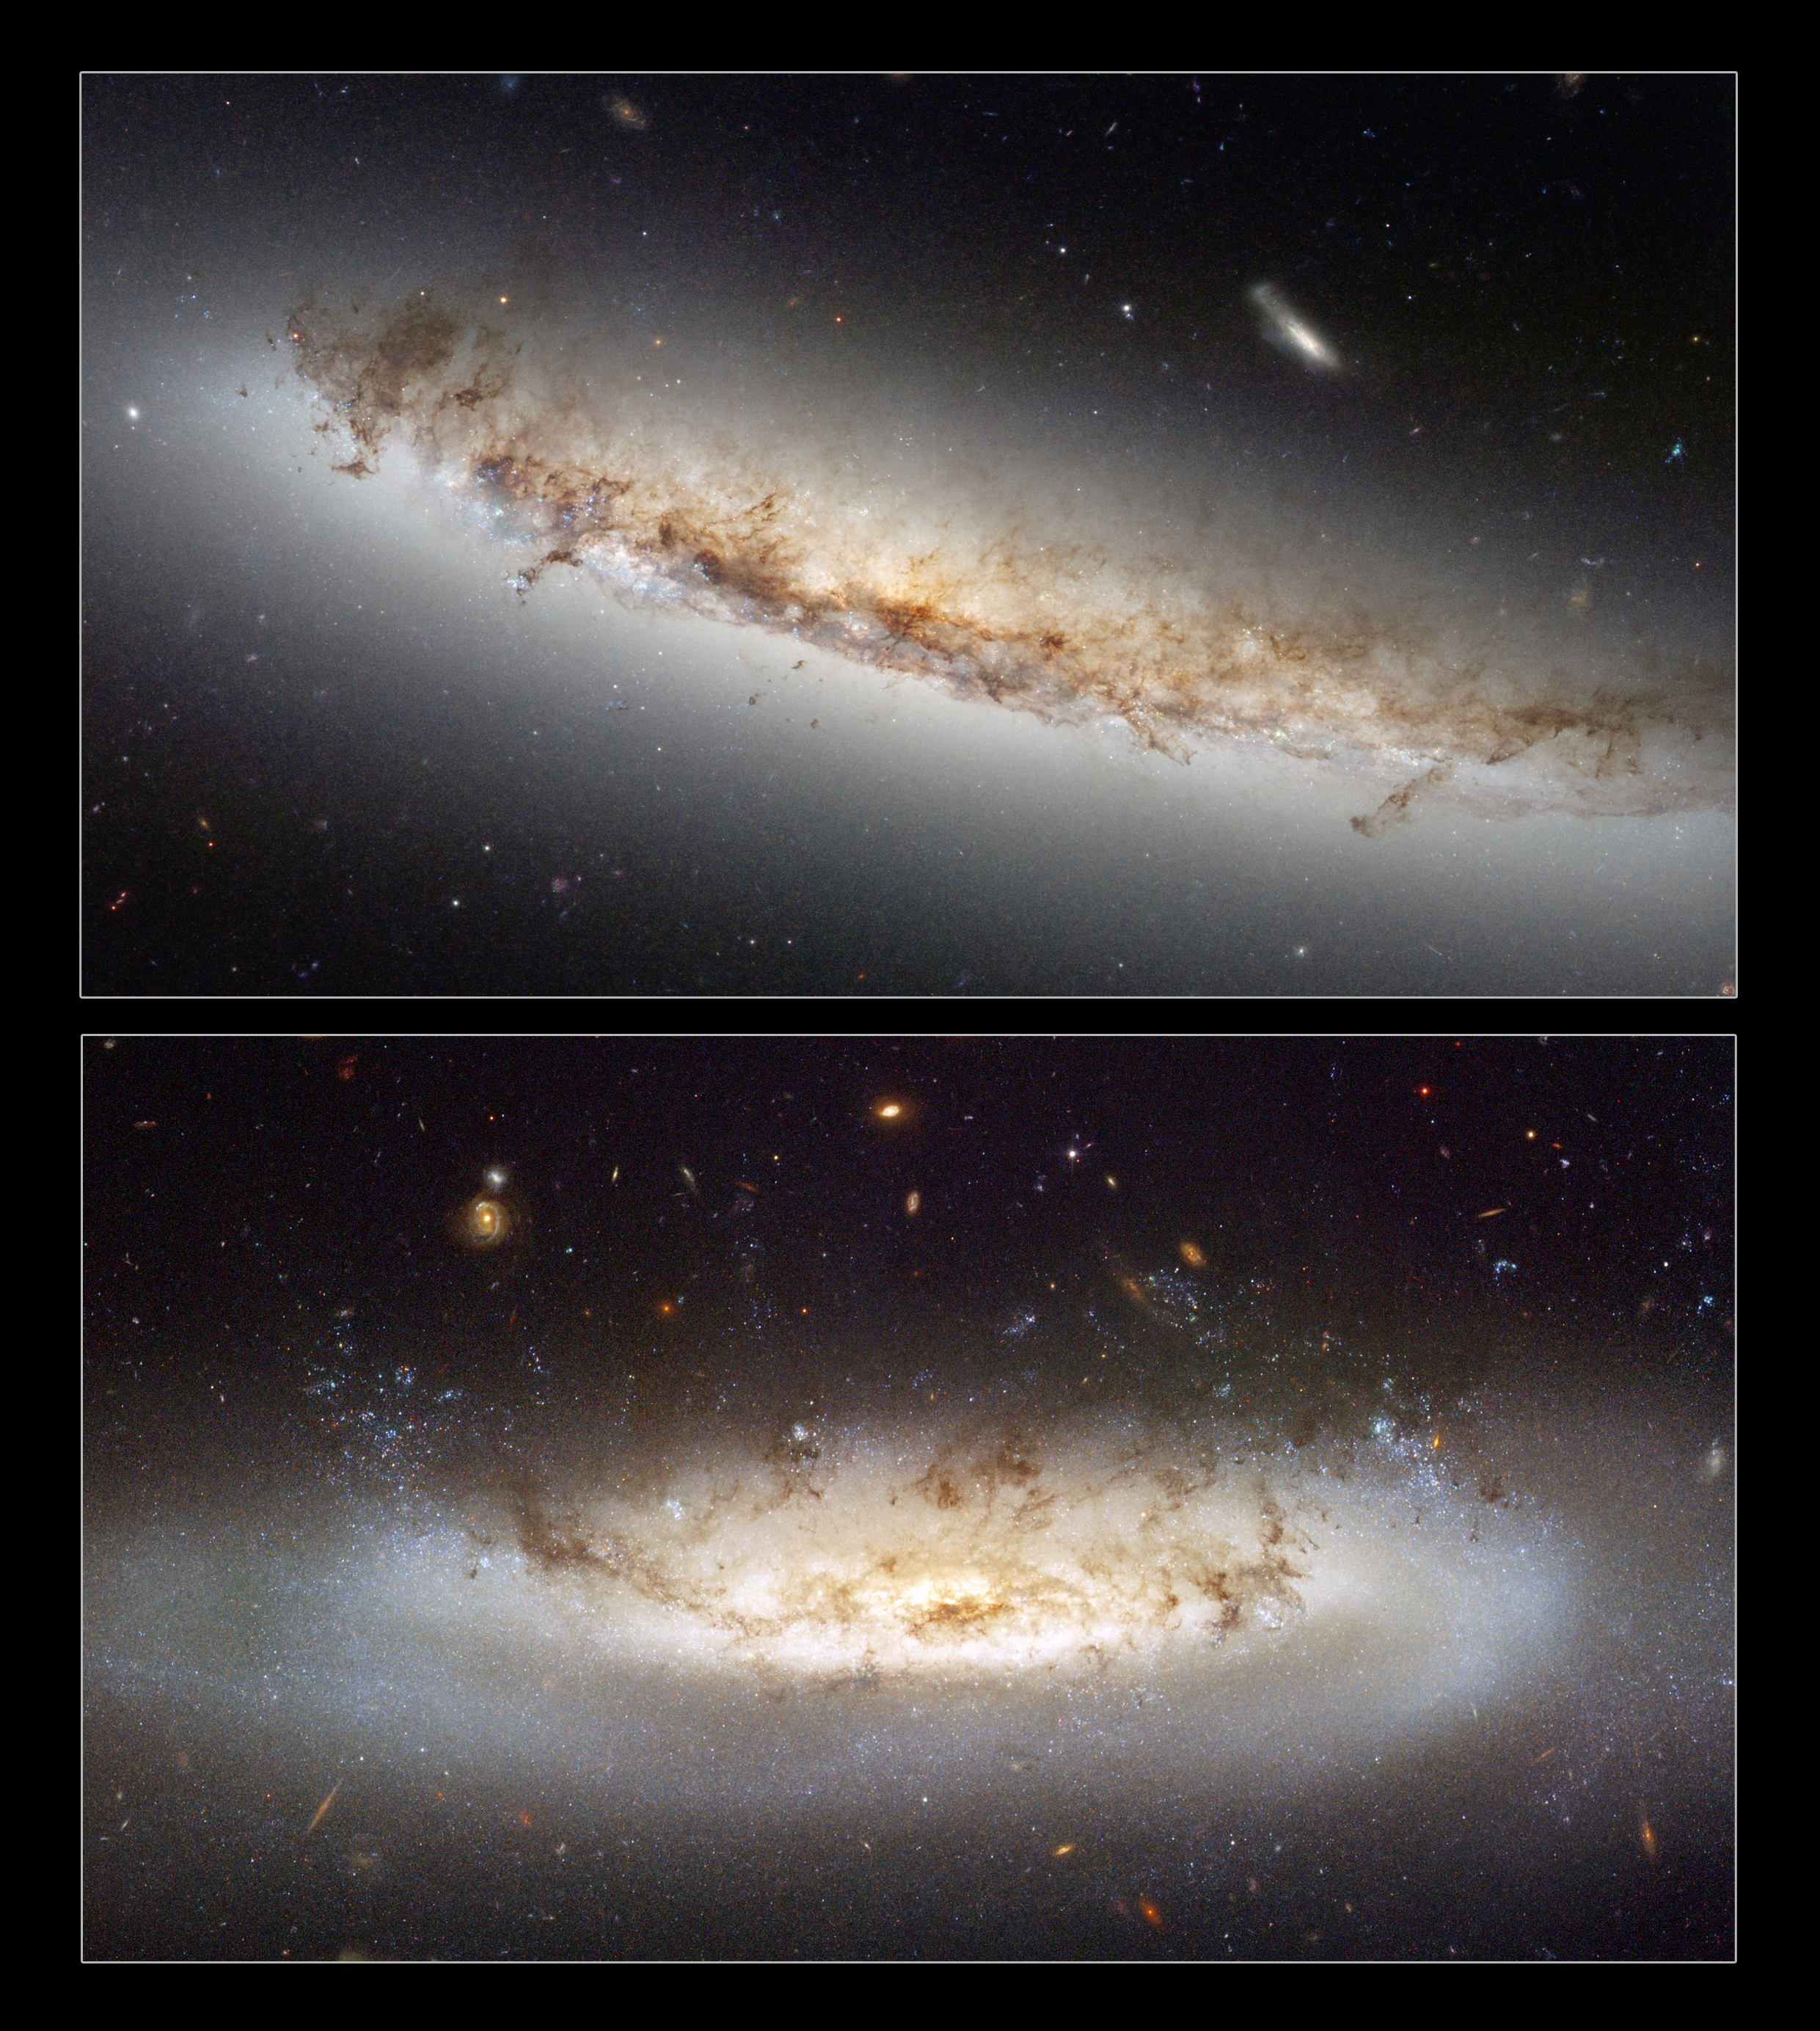

Ram pressure stripping galaxies NGC 4522 and NGC 4402

This composite shows the two ram pressure stripping galaxies NGC 4402 and NGC 4522.

Hubble's Advanced Camera for Surveys (ACS) allows astronomers to study an interesting and important phenomenon called ram pressure stripping that is so powerful, it is capable of mangling galaxies and even halting their star formation.

The first image shows NGC 4402 and highlights some telltale signs of ram pressure stripping such as the curved, or convex, appearance of the disc of gas and dust, a result of the forces exerted by the heated gas. Light being emitted by the disc backlights the swirling dust that is being swept out by the gas. Studying ram pressure stripping helps astronomers better understand the mechanisms that drive the evolution of galaxies, and how the rate of star formation is suppressed in very dense regions of the Universe like clusters.

The second image, NGC 4522, is a spectacular example of a spiral galaxy that is currently being stripped of its gas content. The galaxy is part of the Virgo galaxy cluster and its rapid motion within the cluster results in strong winds across the galaxy as the gas within is leftNGC 4522 behind. Scientists estimate that the galaxy is moving at more than 10 million kilometres per hour. A number of newly formed star clusters that developed in the stripped gas can be seen in the Hubble image. The stripped spiral galaxy is located some 60 million light-years away from Earth.

Credit: NASA & ESA